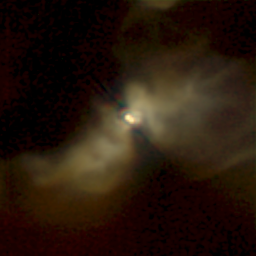

NICMOS Peers Through Dust to Reveal Young Stellar Disks. A View of IRAS 04248+2612

In this image of IRAS 04248+2612, the infrared eyes of NICMOS peer through a dusty cloud to reveal a double-star system in formation. A nebula extends at least 65 billion miles (105 billion kilometres) in opposite directions from the twin stars, and is illuminated by them. This nebula was formed from material ejected by the young star system. The apparent 'pinching' of this nebula close to the binary suggests that a ring or disk of dust and gas surrounds the two stars.

Credit: D. Padgett (IPAC/Caltech), W. Brandner (IPAC), K. Stapelfeldt (JPL) and NASA/ESA